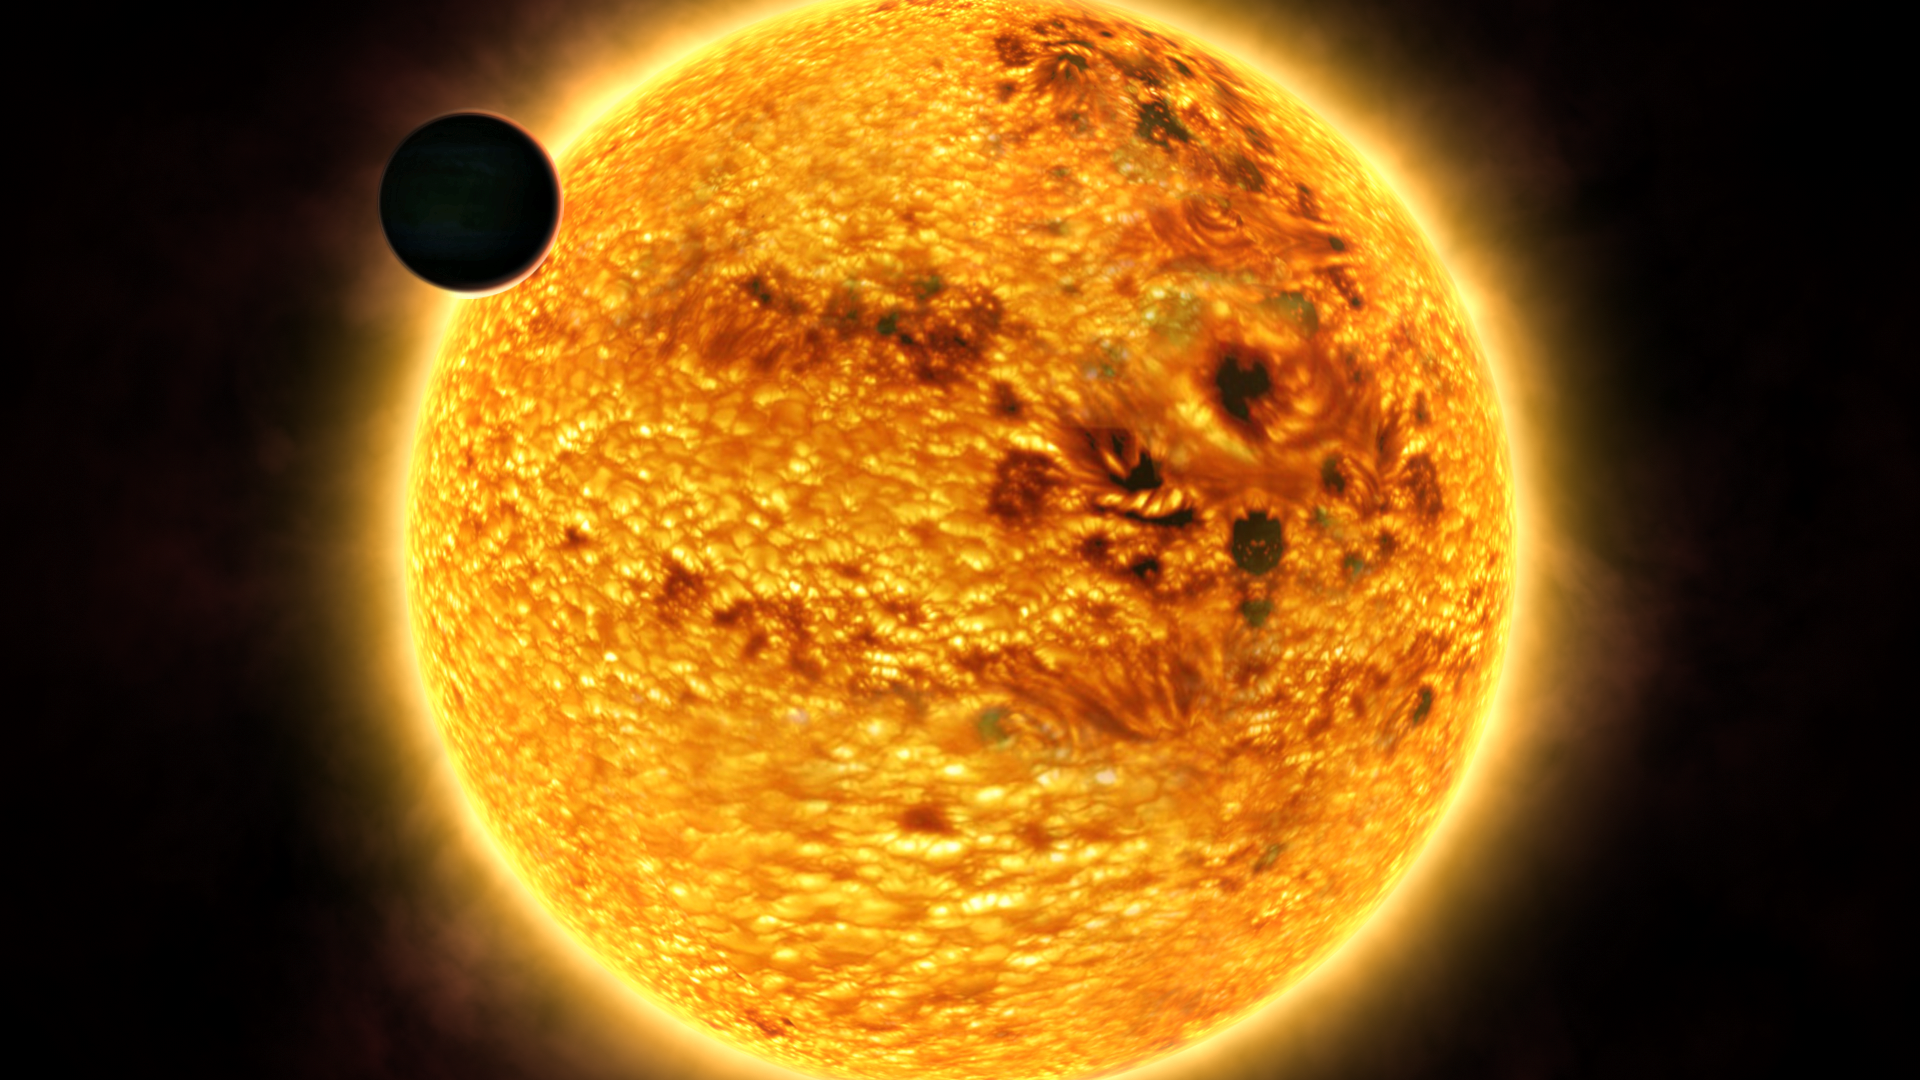

Artist's impression of the hazy red sunset on HD 189733b

An artist's impression of the extrasolar planet HD 189733b seen here with its parent star looming behind. The planet is slightly larger than our own Solar System's Jupiter. Its atmosphere is a scorching eight hundred degrees Celsius. Astronomers have found that the sunset on HD 189733b would look similar to a hazy red sunset on Earth.

Credit: ESA, NASA and Frédéric Pont (Geneva University Observatory)